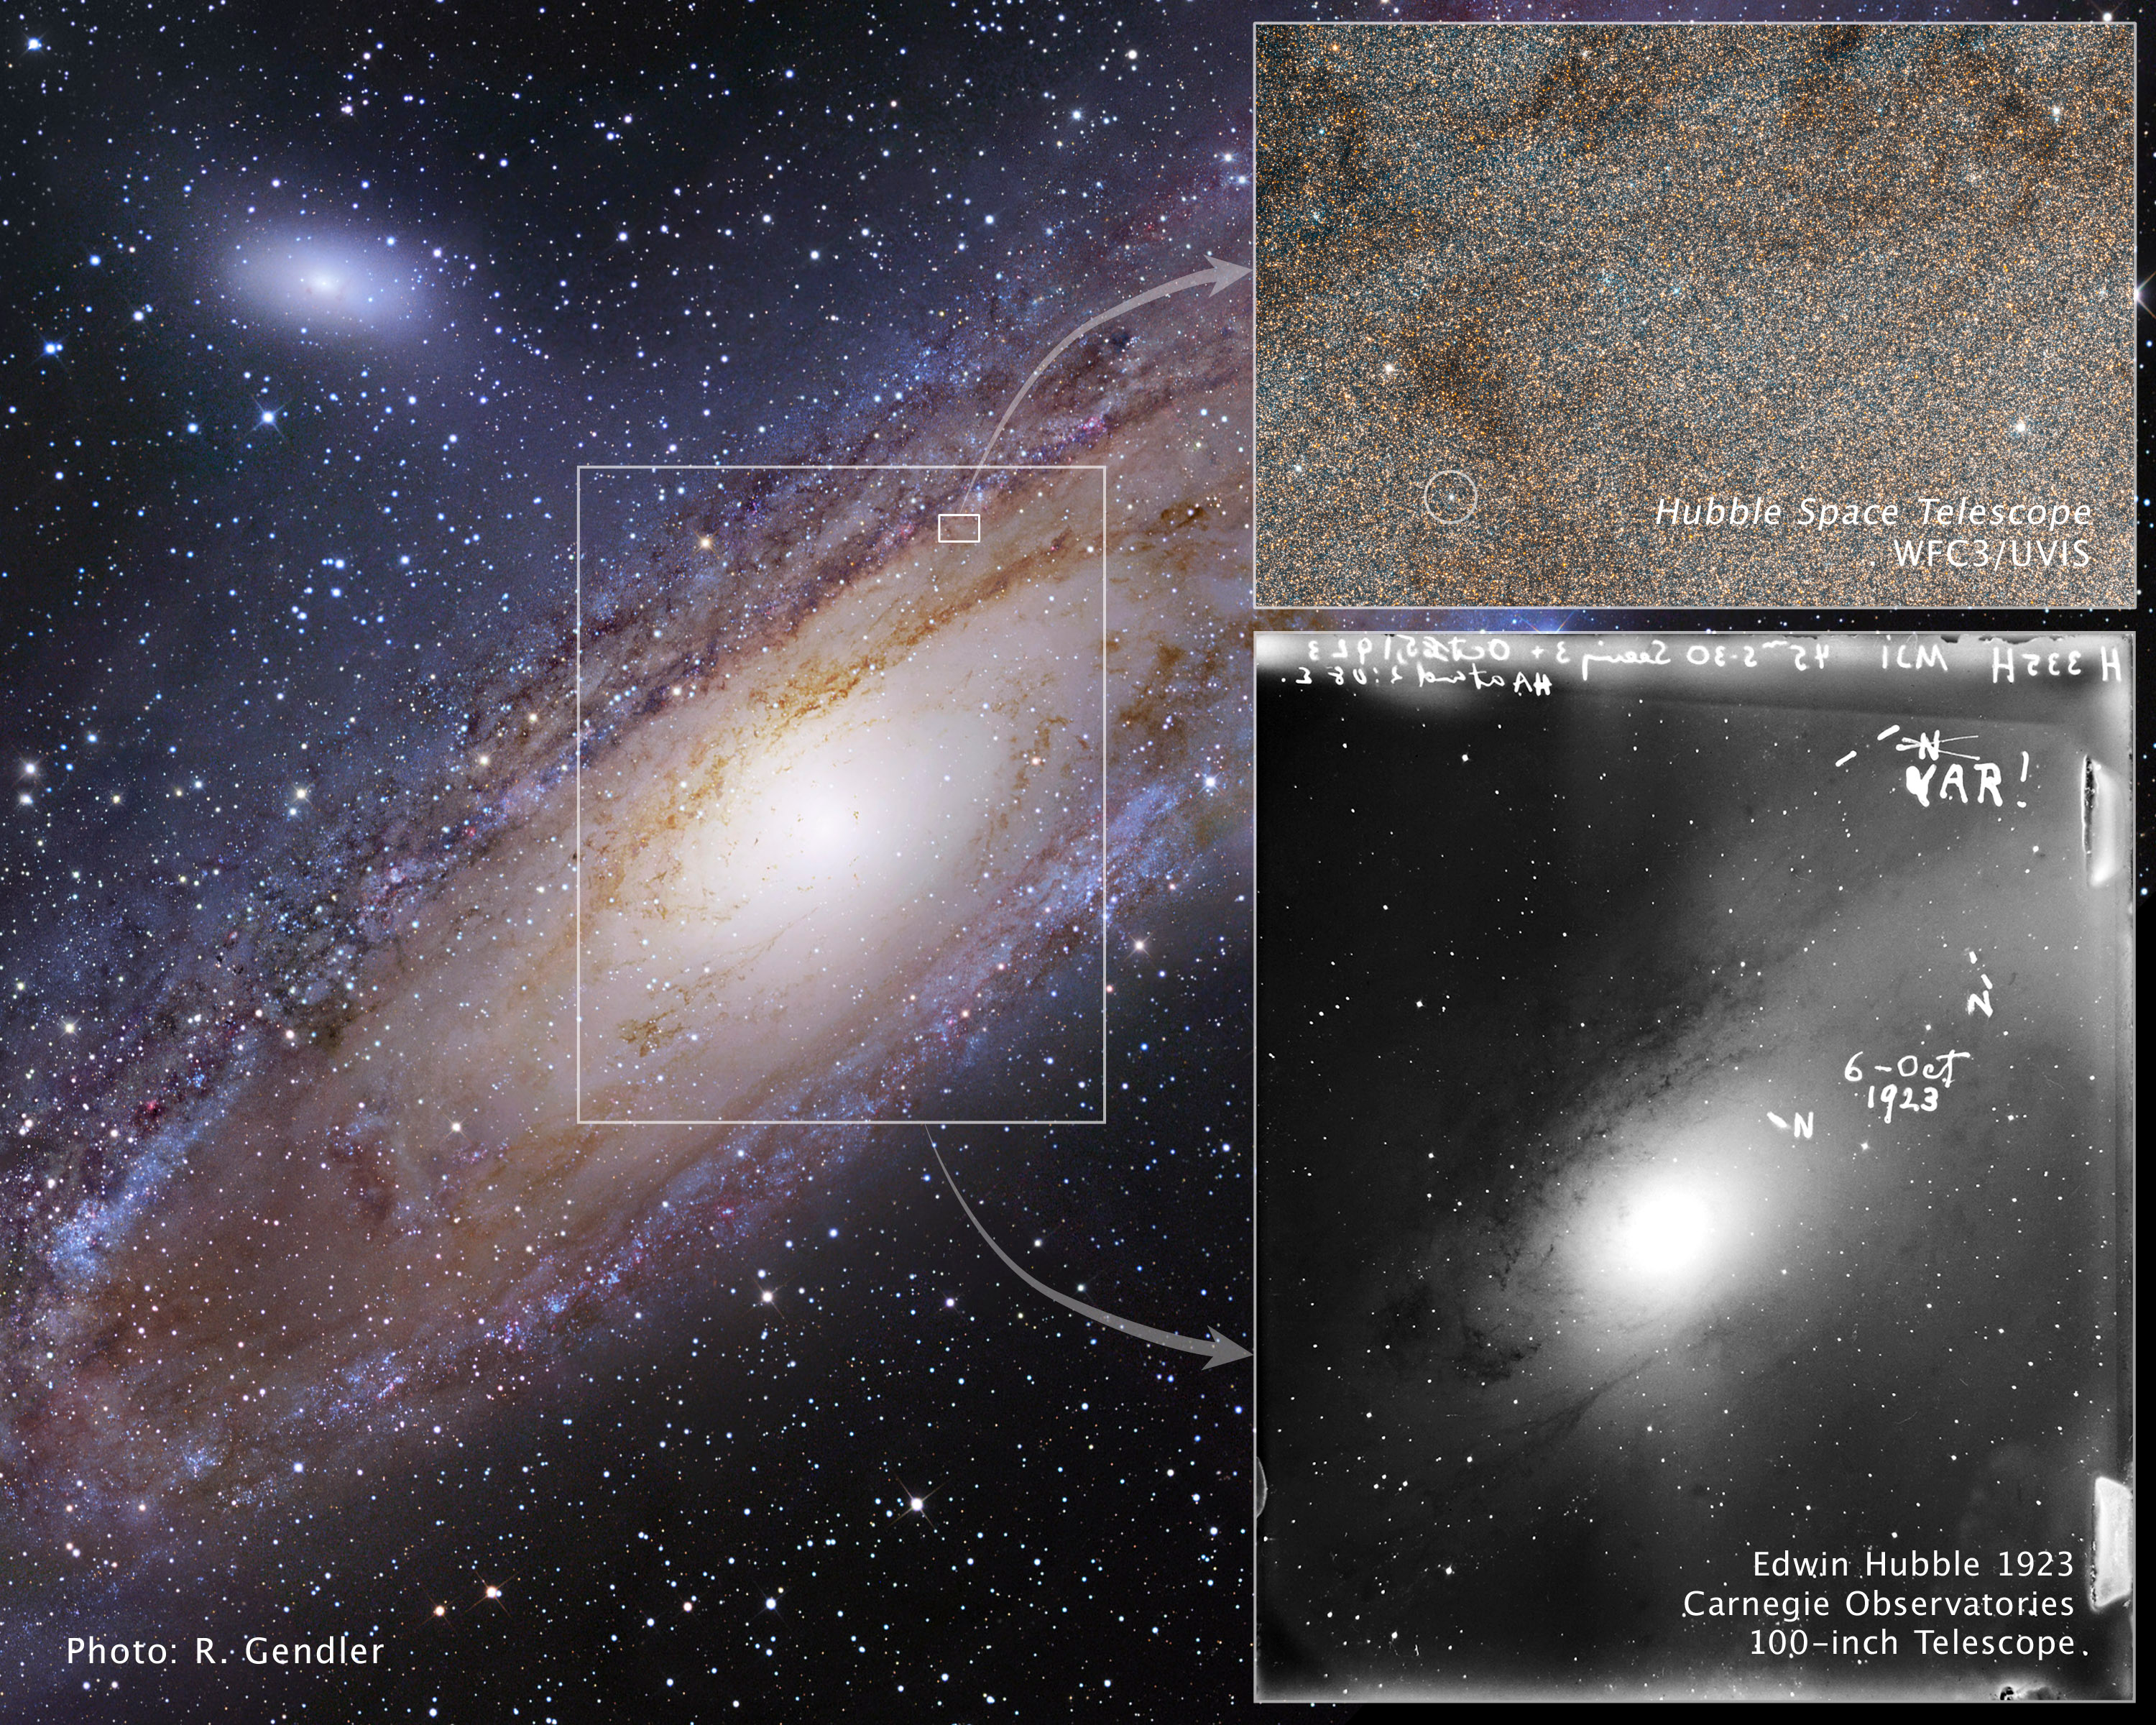

Snapshots of the star that changed the Universe

Views of a famous pulsating star taken nearly 90 years apart and a portrait of its galactic home are shown in this image collection.

The pancake-shaped disk of stars, gas, and dust that make up the Andromeda galaxy, or M31, is shown in the image at left. Andromeda is a Milky Way neighbor and resides 2 million light-years away.

The tiny white box just above centre outlines the Hubble Space Telescope view. An arrow points to the Hubble image, taken by the Wide Field Camera 3. The snapshot is blanketed with stars, which look like grains of sand.

The white circle at lower left identifies Hubble variable number one, or V1, the Cepheid variable star discovered by astronomer Edwin Hubble in 1923. Cepheid variables are pulsating stars that brighten and fade in a predictable pattern. Astronomers use them to calculate how far away they are from Earth.

The large white box outlines the region imaged by astronomer Edwin Hubble, who used the 100-inch Hooker telescope, the most powerful telescope of that era. An arrow points to a copy of Hubble's image of Andromeda, which was made on a 4-inch-by-5-inch (approximately 10 x 13 cm) glass plate and dated 6 October 1923.

Edwin Hubble originally identified three novae, a class of exploding star, by writing "N" next to each object. Later, Hubble realized that the nova at top right was actually a Cepheid variable. He crossed out the "N" and wrote "VAR," for variable. This star allowed Hubble to calculate a reliable distance to Andromeda, proving that it was a separate galaxy outside our Milky Way.

Credit: NASA, ESA and Z. Levay (STScI). Credit: NASA, ESA and the Hubble Heritage Team (STScI/AURA)